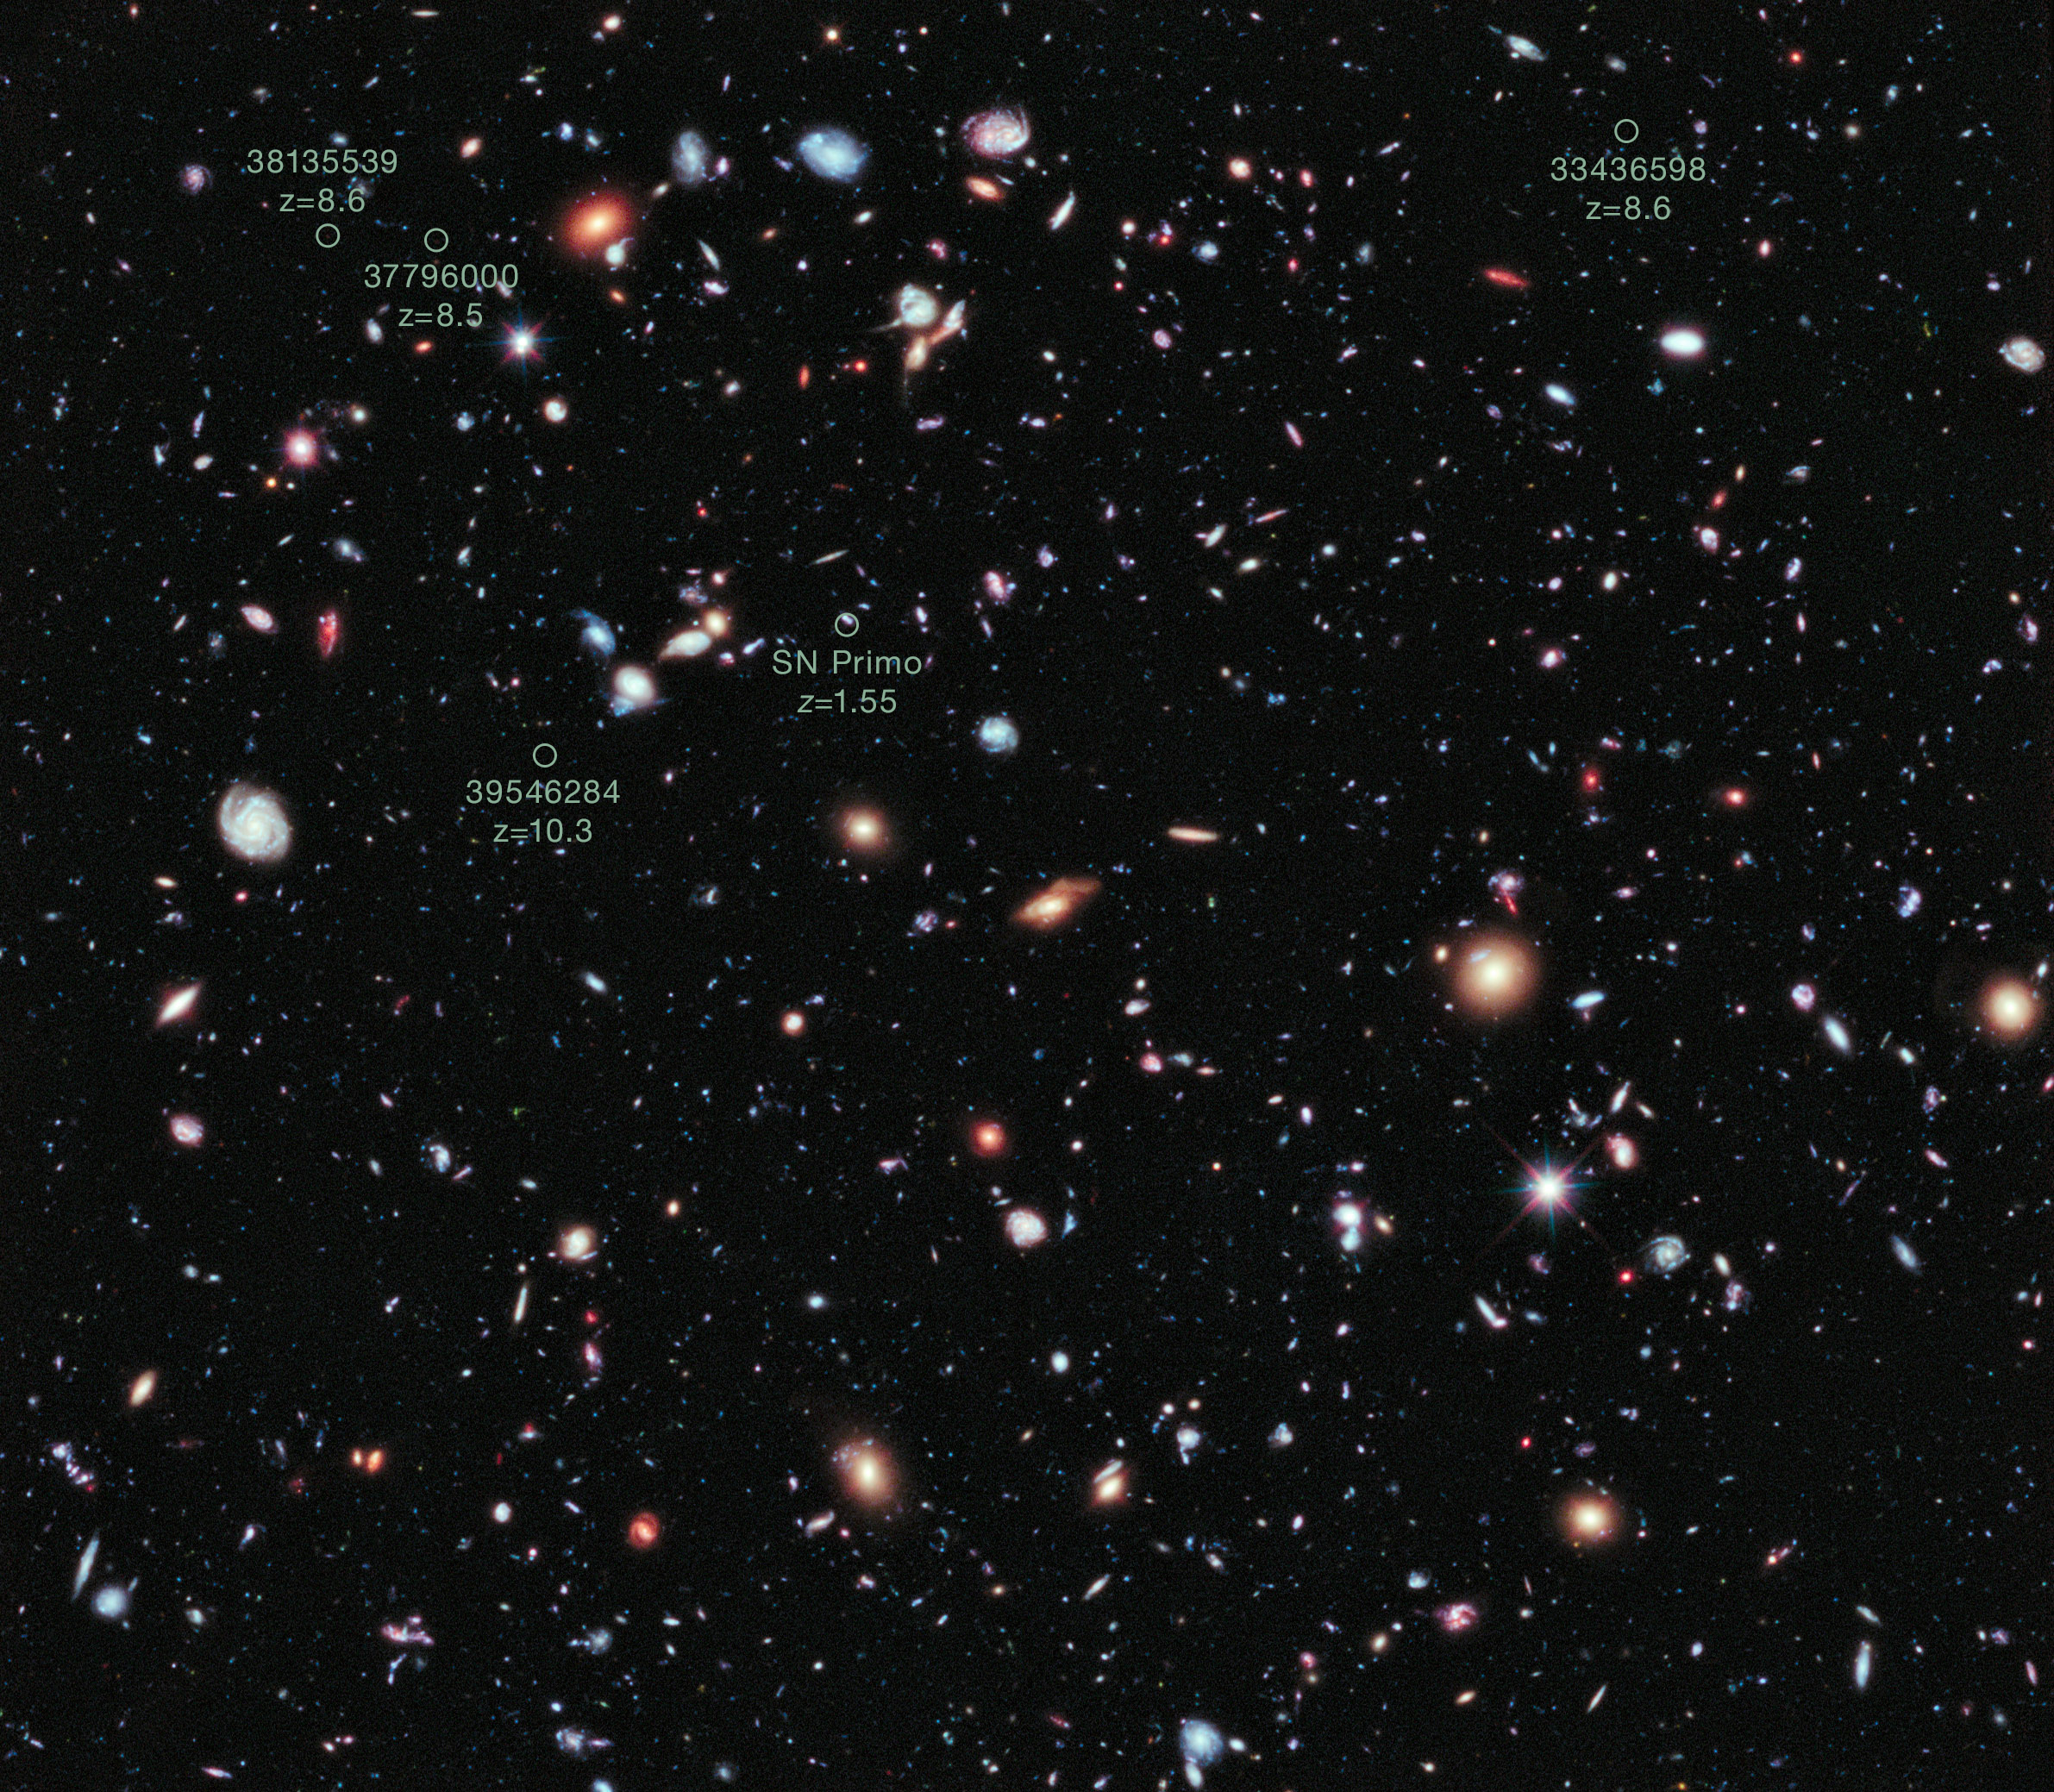

The Hubble eXtreme Deep Field (annotated)

This image, called the Hubble eXtreme Deep Field (XDF), combines Hubble observations taken over the past decade of a small patch of sky in the constellation of Fornax. With a total of over two million seconds of exposure time, it is the deepest image of the Universe ever made, combining data from previous images including the Hubble Ultra Deep Field of 2002/3 and Hubble Ultra Deep Field infrared image of 2009.

The image covers an area less than a tenth of the width of the full Moon, making it just a 30 millionth of the whole sky. Yet even in this tiny fraction of the sky, the long exposure reveals about 5500 galaxies, some of them so distant we see them when the Universe was less than 5% of its current age.

The Hubble eXtreme Deep Field image contains several of the most distant objects ever identified.

Among these are:

UDFj-39546284, at a redshift of 10.3, is a candidate for the most distant galaxy yet discovered, though it is awaiting spectroscopic confirmation
Supernova Primo, at a redshift of 1.55, the most distant type Ia supernova ever observed
UDFy-38135539, at a redshift of 8.6, is the most distant galaxy to have had its distance independently corroborated with spectroscopy
UDFy-33436598, at a redshift of 8.6

Credit: NASA, ESA, G. Illingworth, D. Magee, and P. Oesch (University of California, Santa Cruz), R. Bouwens (Leiden University), and the HUDF09 Team